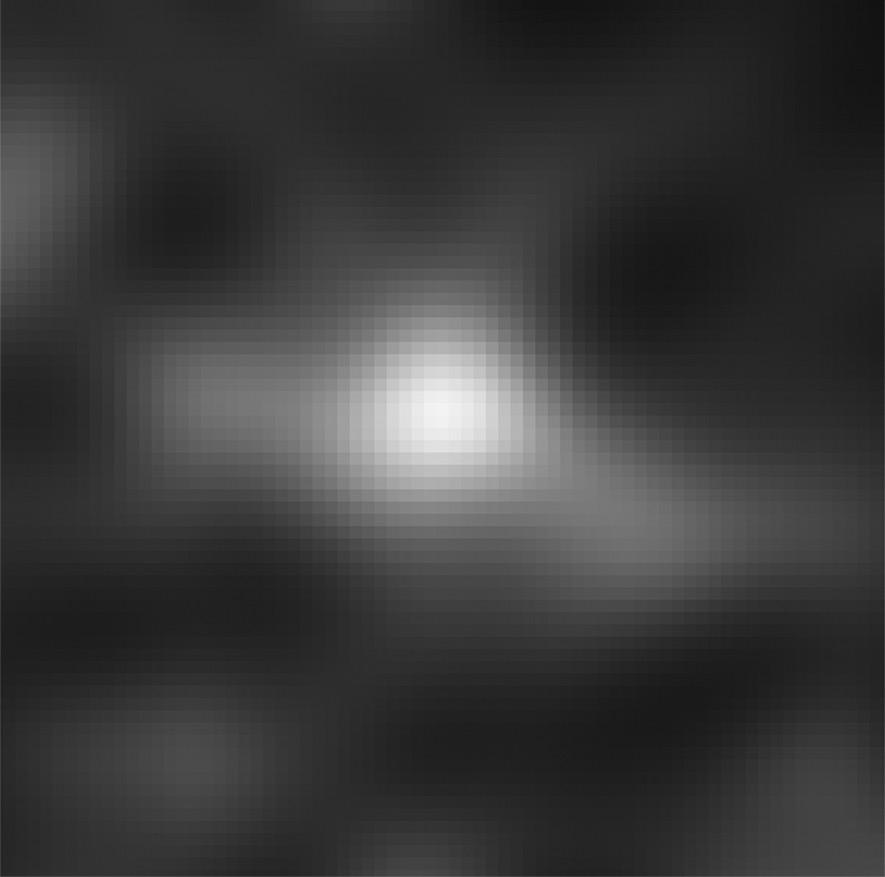

Hubble finds a new contender for galaxy distance record

Astronomers have used Hubble to spot what they think is the furthest and one of the very earliest galaxies ever seen in the Universe. Candidate galaxy UDFj-39546284 appears in this greyscale image drawn from an ultra deep field exposure taken with the NASA/ESA Hubble Space Telescope. This is the deepest infrared image taken of the Universe. Astronomers believe that its light has taken 13.2 billion years to reach us. Spectroscopic confirmation that this is indeed the most distant galaxy ever seen is expected to come from the NASA/ESA/CSA James Webb Space Telescope, which is planned for launch later this decade.

Credit: NASA, ESA, G. Illingworth (University of California, Santa Cruz), R. Bouwens (University of California, Santa Cruz, and Leiden University) and the HUDF09 Team